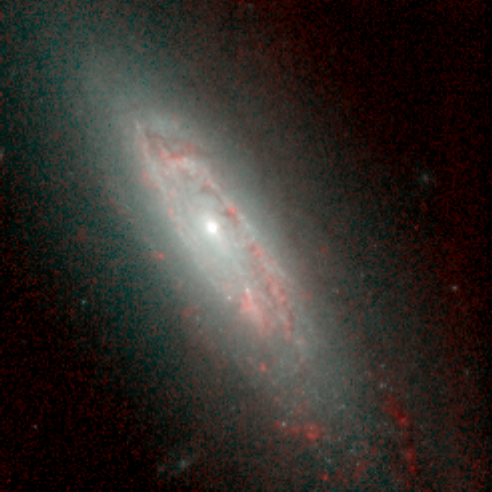

Hubble's Infrared Galaxy Gallery. A View of NGC 3593

Astronomers have used the NASA/ESA Hubble Space Telescope to produce an infrared 'photo essay' of spiral galaxies. By penetrating the dust clouds swirling around the centers of these galaxies, the telescope’s infrared vision is offering fresh views of star birth.

Credit: Torsten Boeker, Space Telescope Science Institute, and NASA/ESA